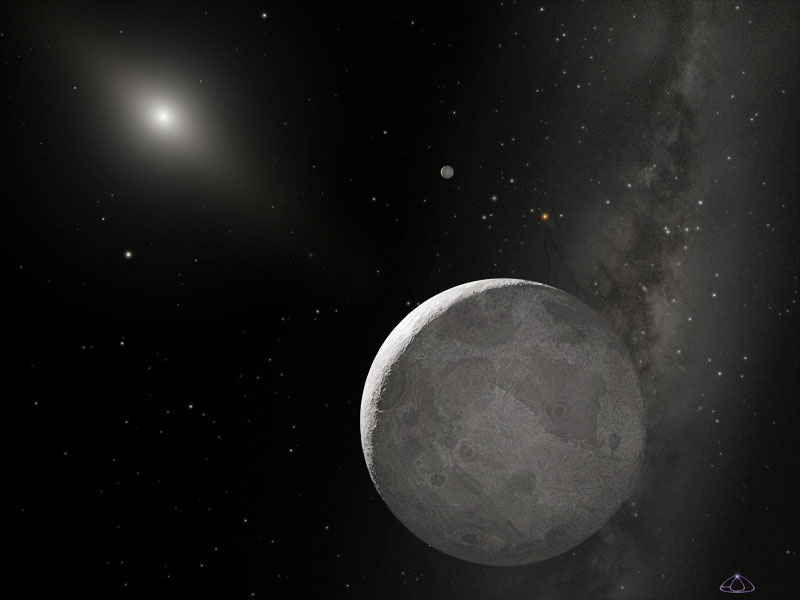

Artist's view of Eris and Dysnomia (Unannotated)

Dysnomia, the mythical child of the Greek goddess Eris. Here, the moon Dysnomia is orbiting dwarf planet Eris.

Credit: NASA, ESA, and Adolph Schaller (for STScI)